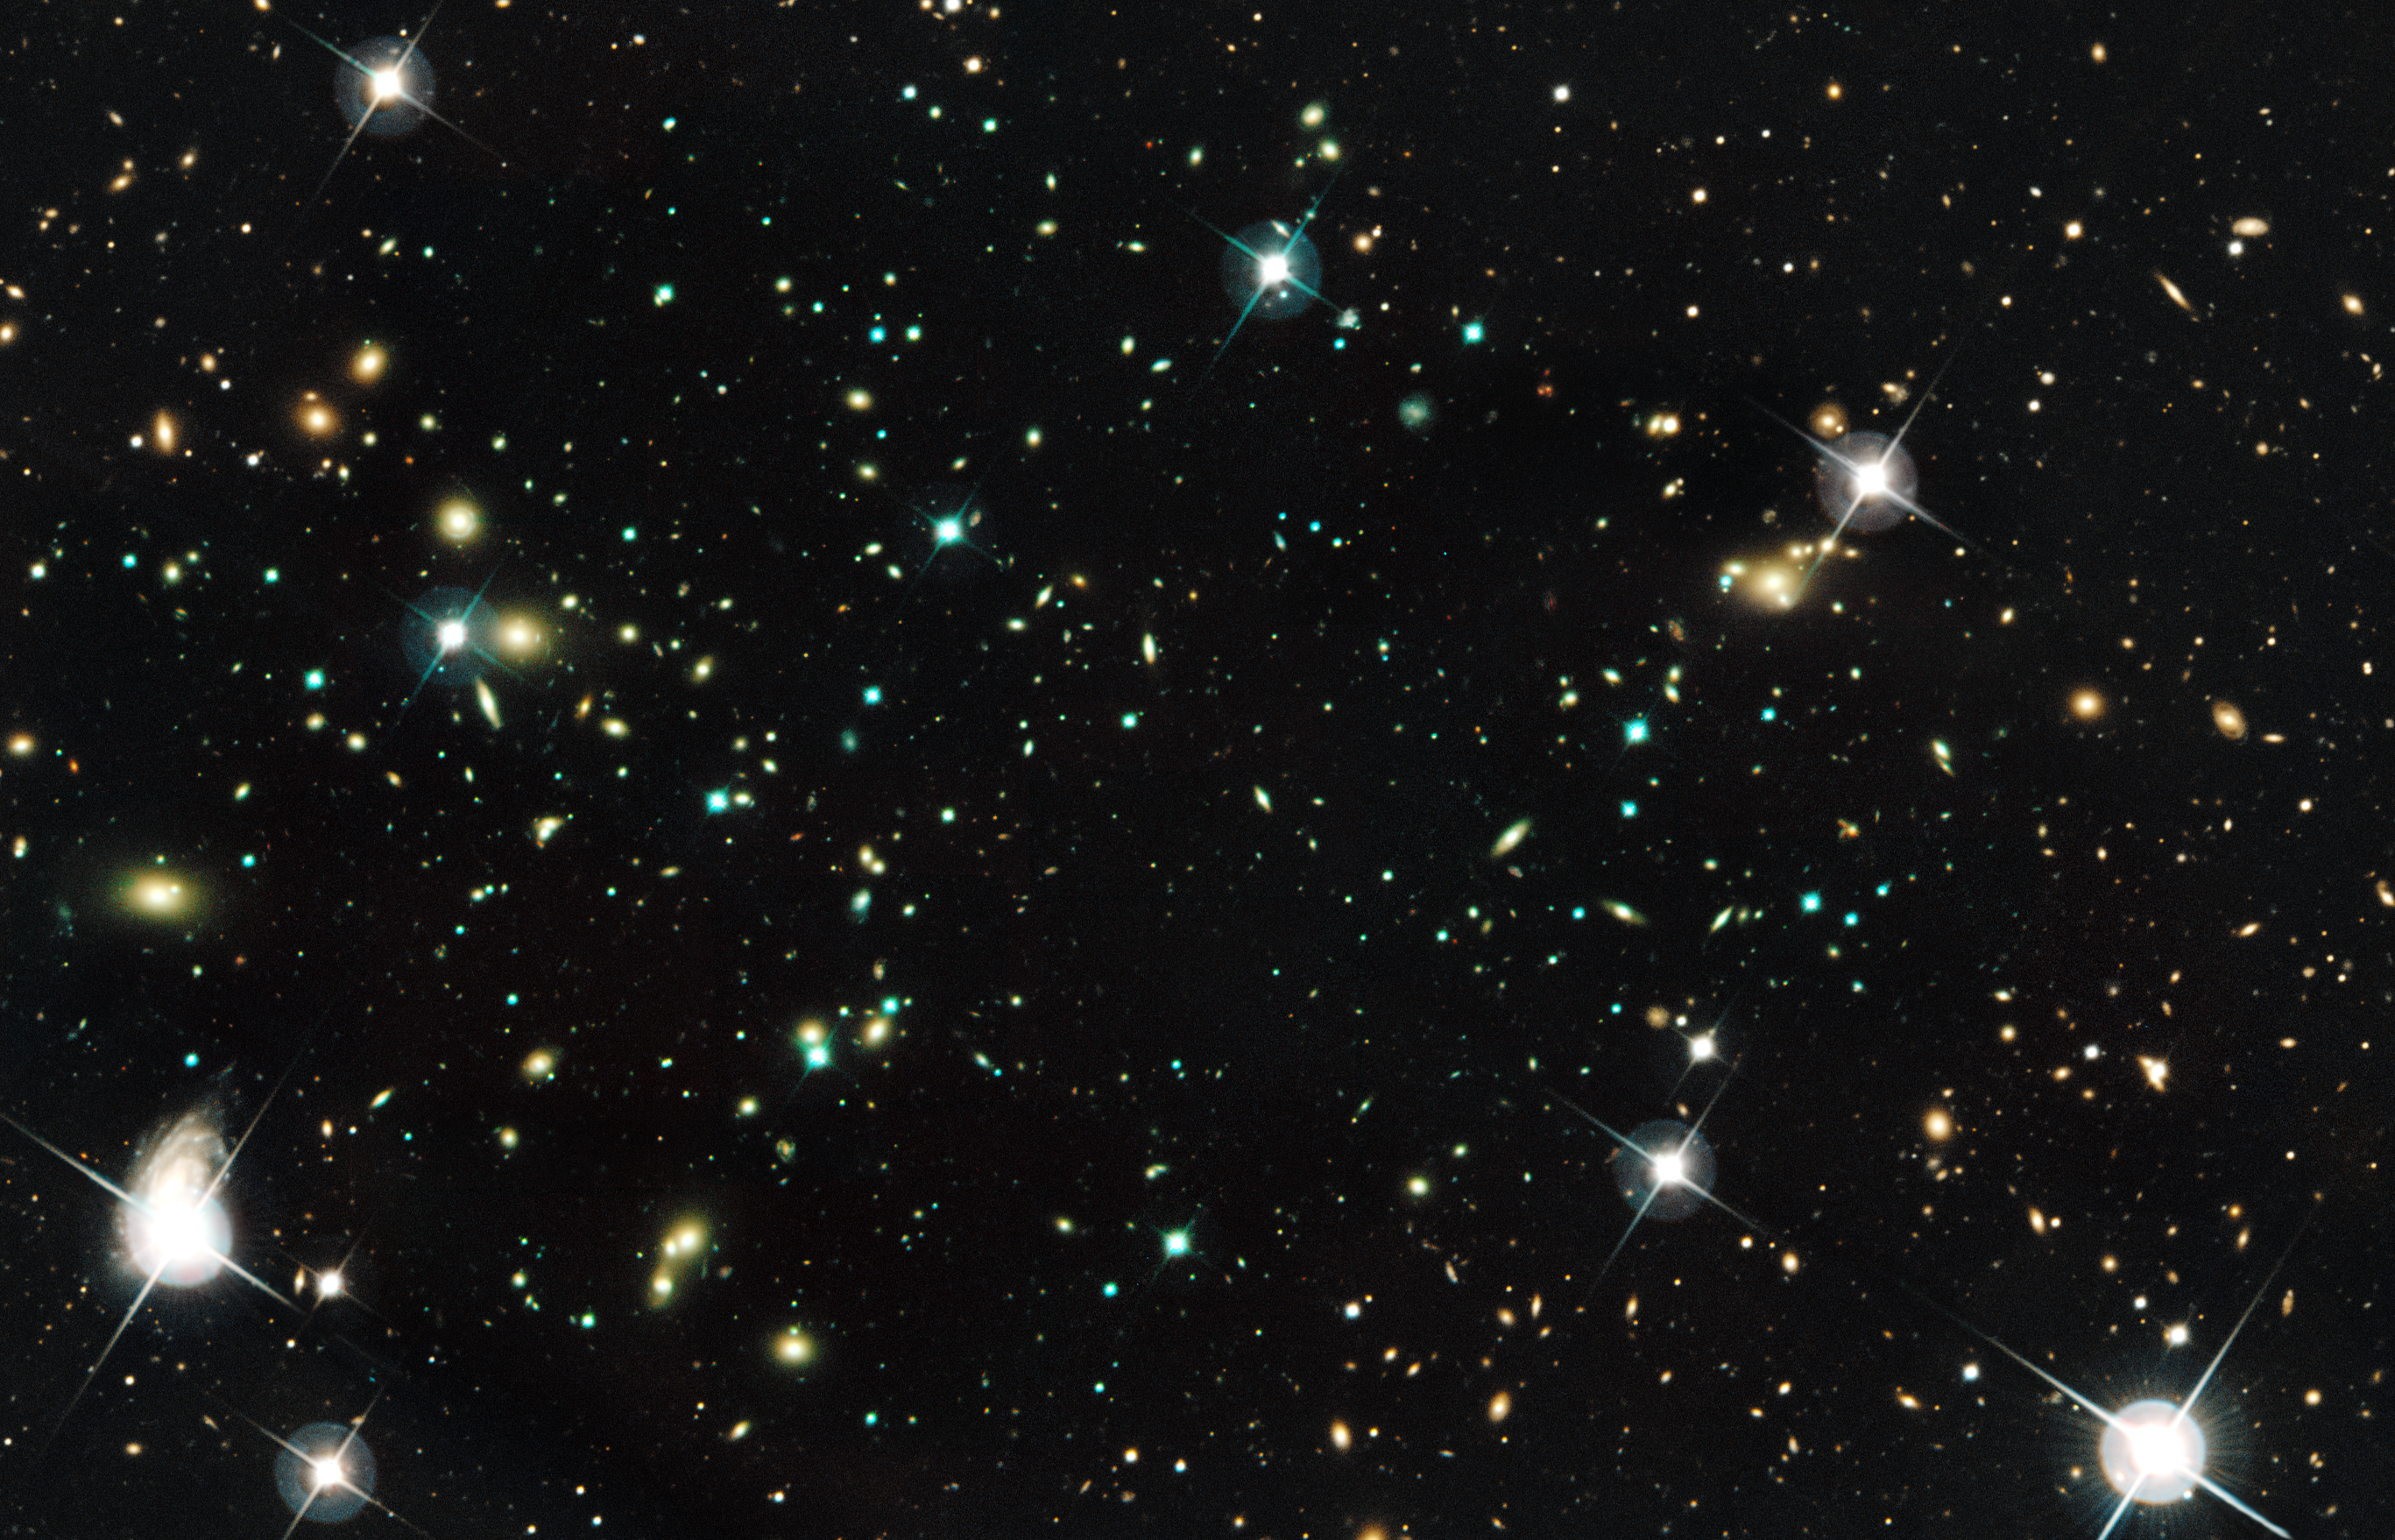

Galaxy cluster Abell 520 (CFHT and HST)

The natural-colour image of the galaxies was taken with the NASA/ESA Hubble Space Telescope and the Canada-France-Hawaii Telescope in Hawaii.

Abell 520 formed from a violent collision of massive galaxy clusters and resides 2.4 billion light-years away.

Credit: NASA, ESA, CFHT, and M.J. Jee (University of California, Davis)